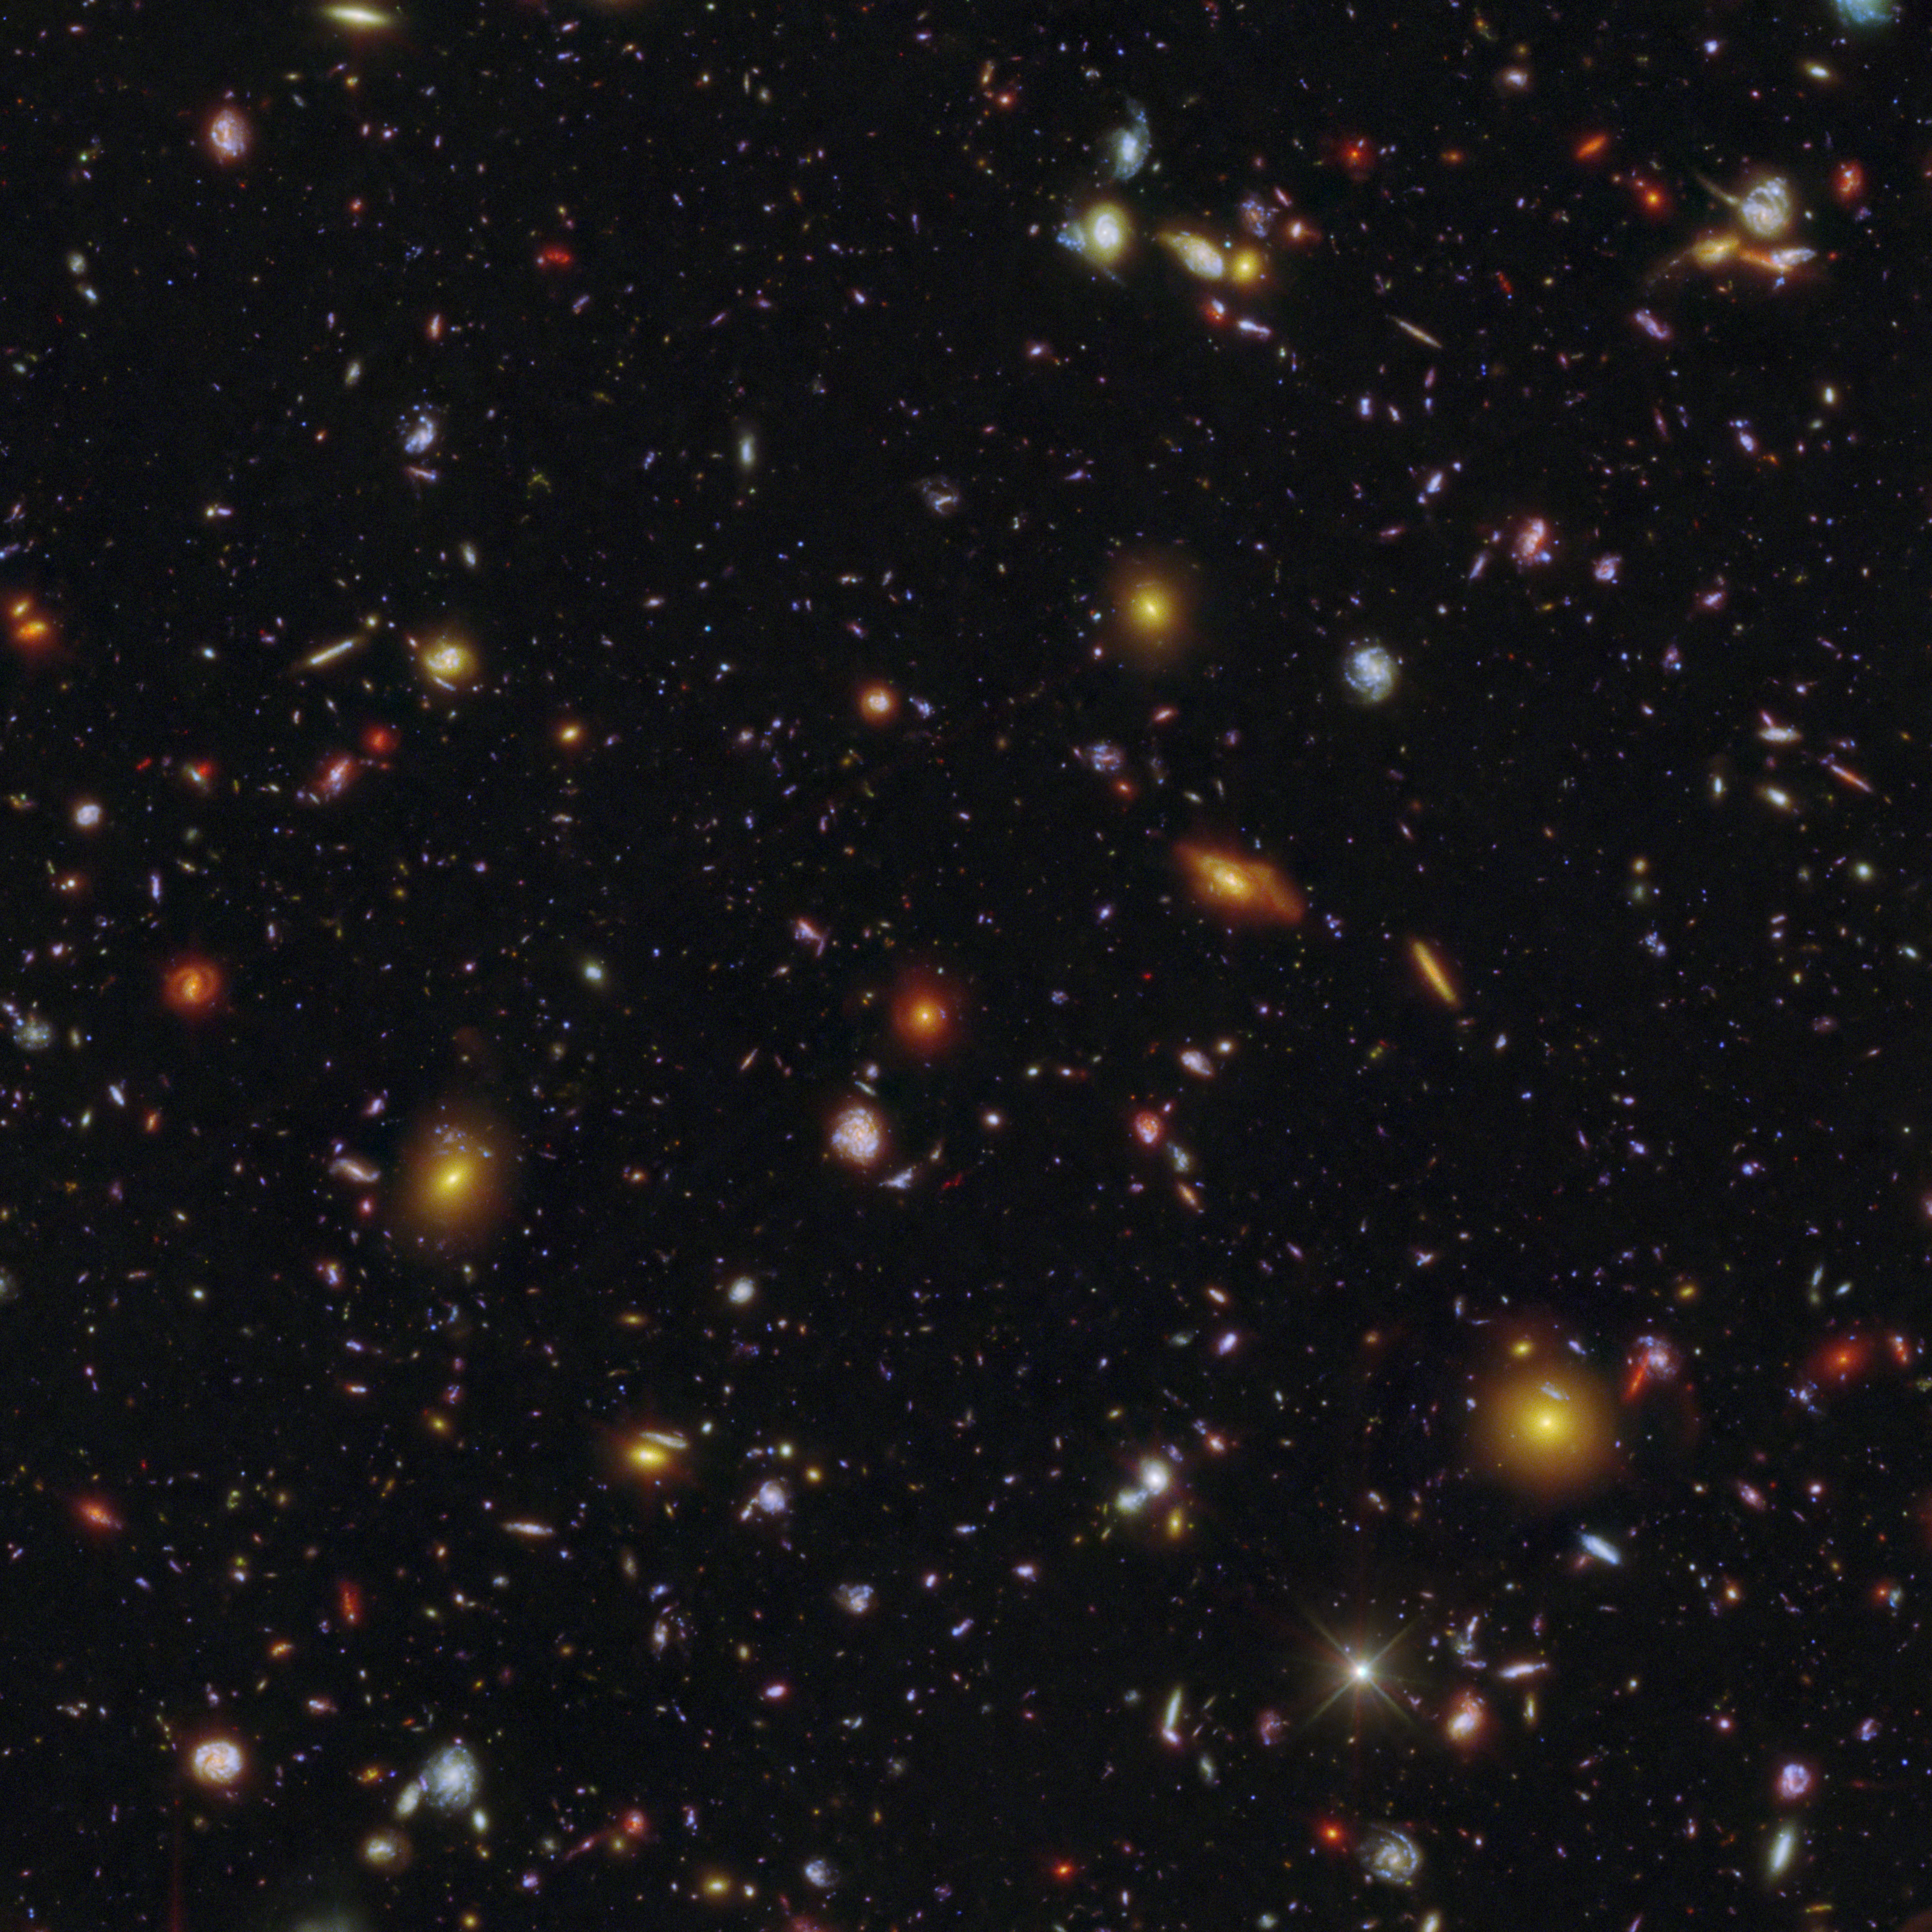

Galaxy field of MXDFz4.4 (Hubble and Webb clean image)

This galaxy field contains the oddball galaxy MXDFz4.4 that existed only 1.4 billion years after the Big Bang, when the Universe was still a “swirl” of opaque and clear gas as the Era of Reionisation was ending.

Detailed visible-light images from the NASA/ESA Hubble Space Telescope revealed that several bursts of younger stars cleared the space in and around the galaxy. The team sifted through extensive Hubble observations that produced deep exposures of the field where this galaxy is located.

The colour assignments in the image emphasise the specific wavelengths of light Hubble observed where ionising photons from MXDFz4.4 were detected, which transformed the gas around them from opaque to clear.

Researchers have long sought evidence to explain how the Universe transitioned from foggy to transparent — and Hubble has provided the first example this close to the era of reionisation of how that might have happened within an individual galaxy.

Credit: NASA, ESA, STScI, I. Goovaerts, M. Rafelski, A. Koekemoer (STScI). Image Processing: A. Pagan (STScI)